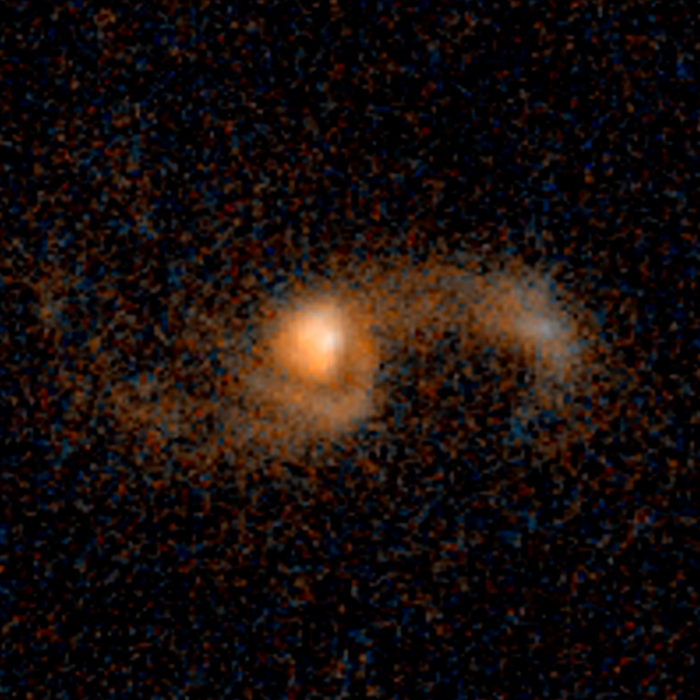

Merging galaxies — 5.3 billion light-years from Earth

Merging galaxies — 5.3 billion light-years from Earth.

Credit: NASA, ESA, and J. Lotz (STScI)